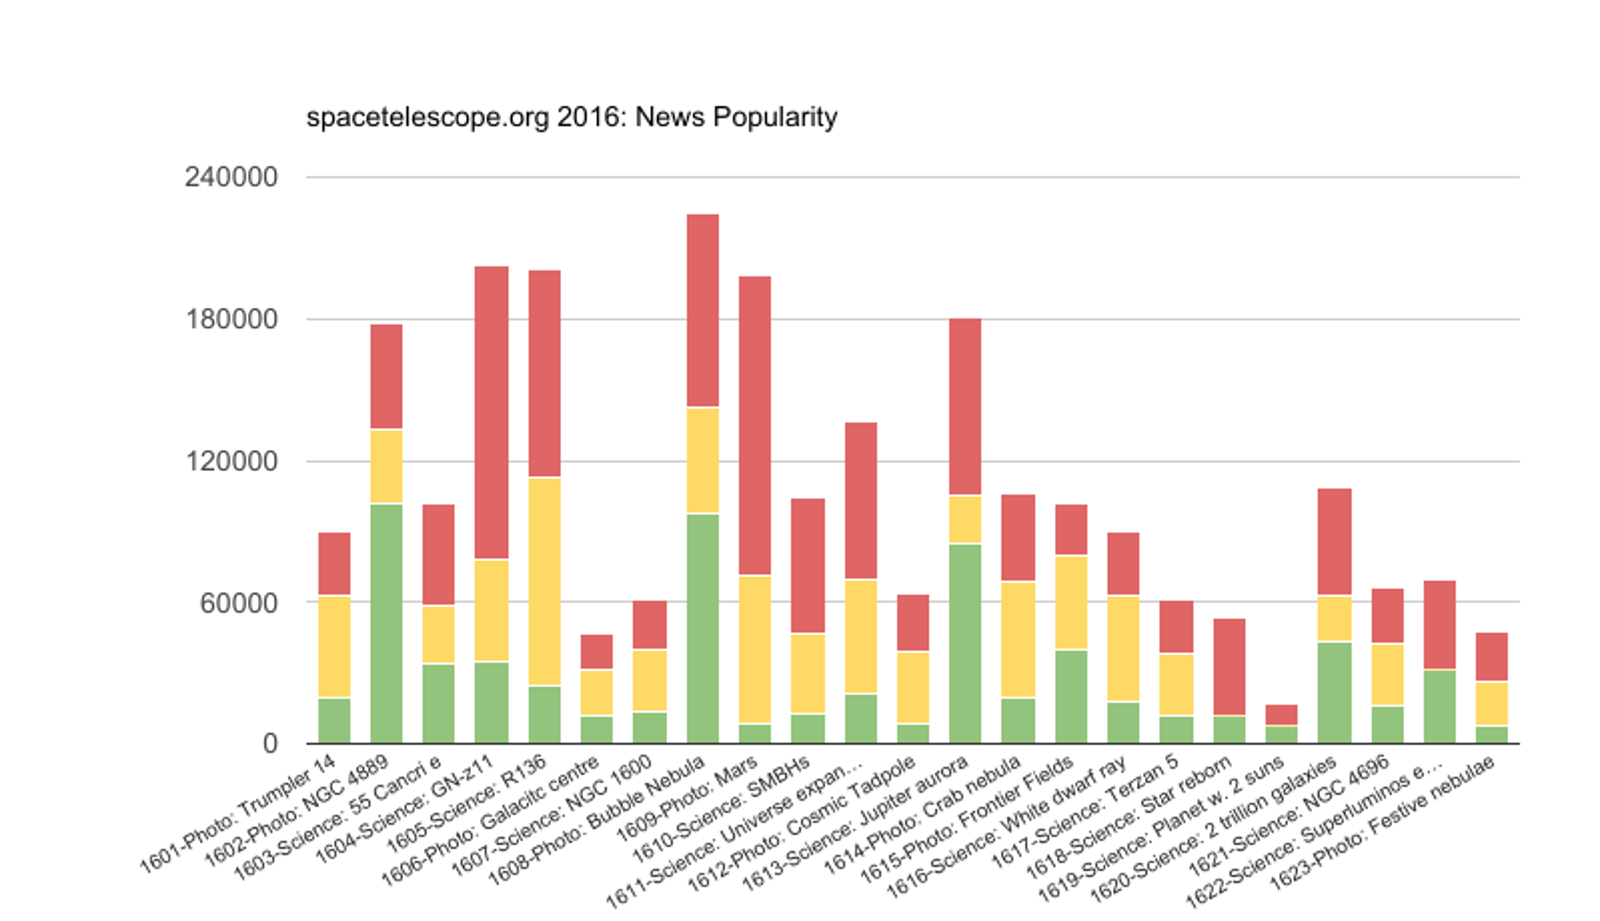

Press releases 2016

Relative impact of all press releases produced by ESA/Hubble in 2016. Stats are created by the number of press clippings found on the web, direct clicks on spacetelescope.org and clicks on Eurekalert.

Credit: ESA/Hubble